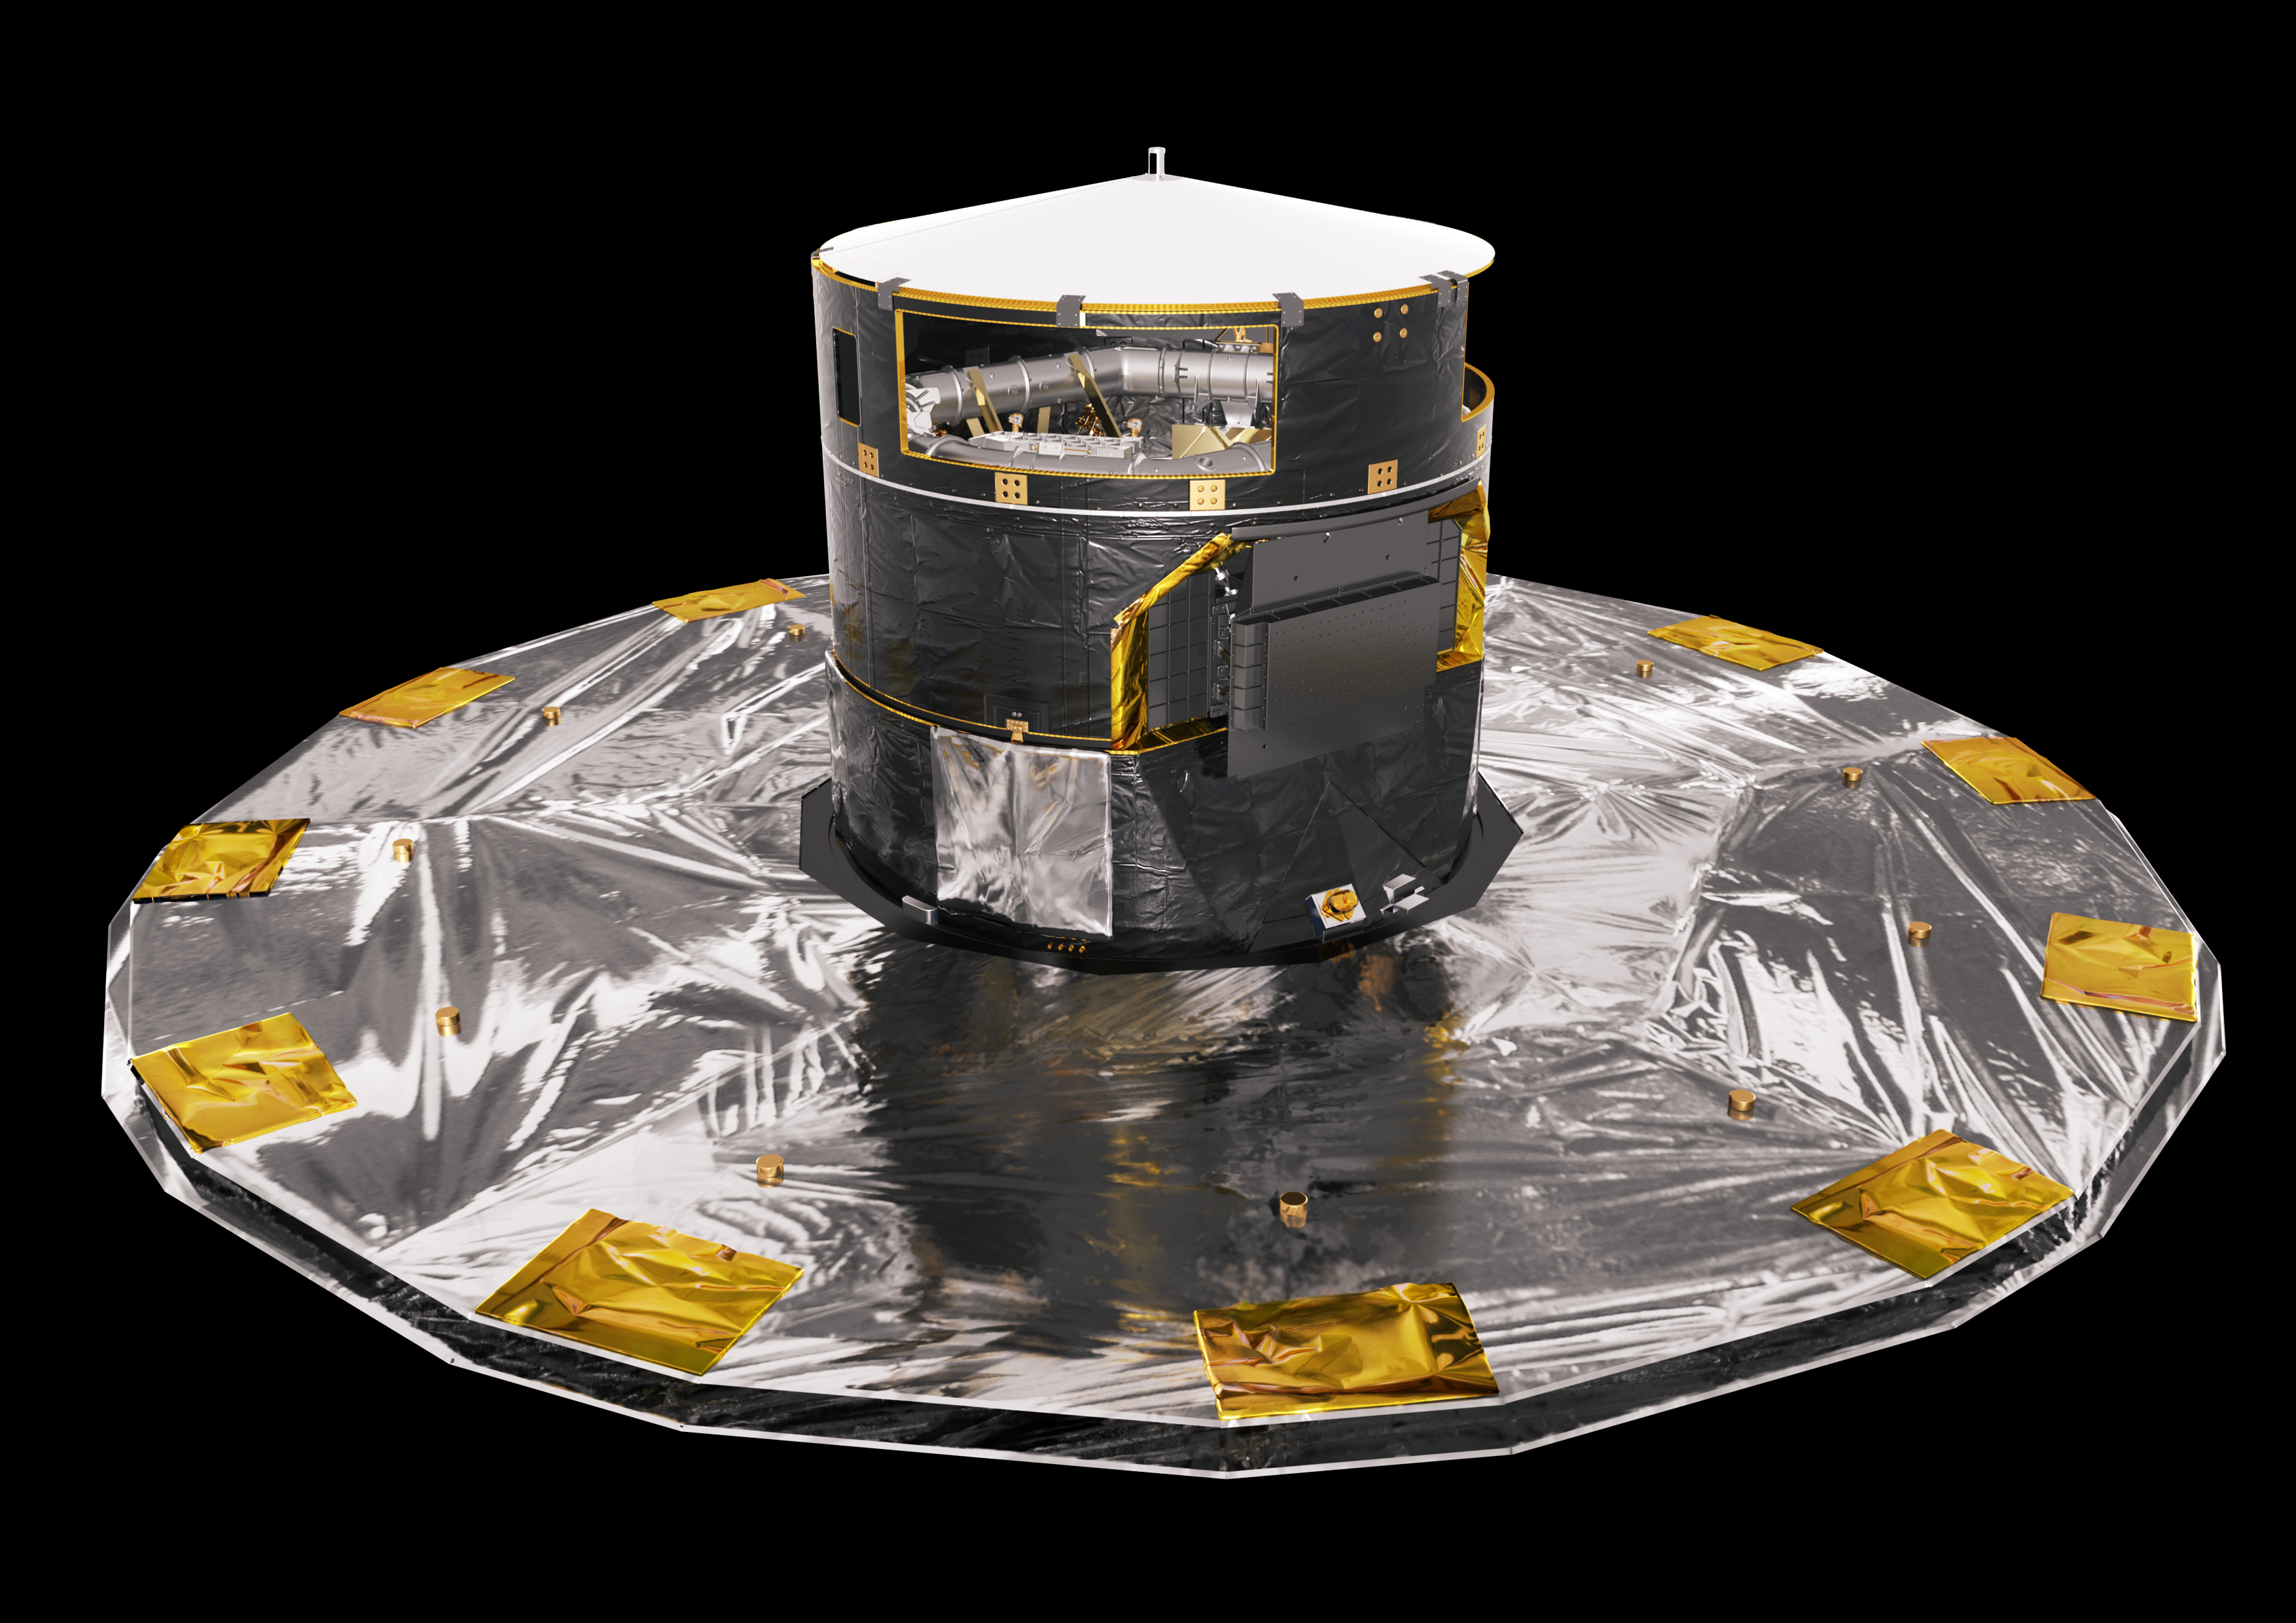

ESA’s Gaia satellite

ESA’s Gaia satellite is a space telescope designed to measure the positions of billions of stars with unprecedented precision. Gaia was launched on 19 December 2013 and is located at the L2 Lagrange point — the same location that the upcoming NASA/ESA/CSA James Webb Space Telescope will have.

Credit: ESA/ATG medialab